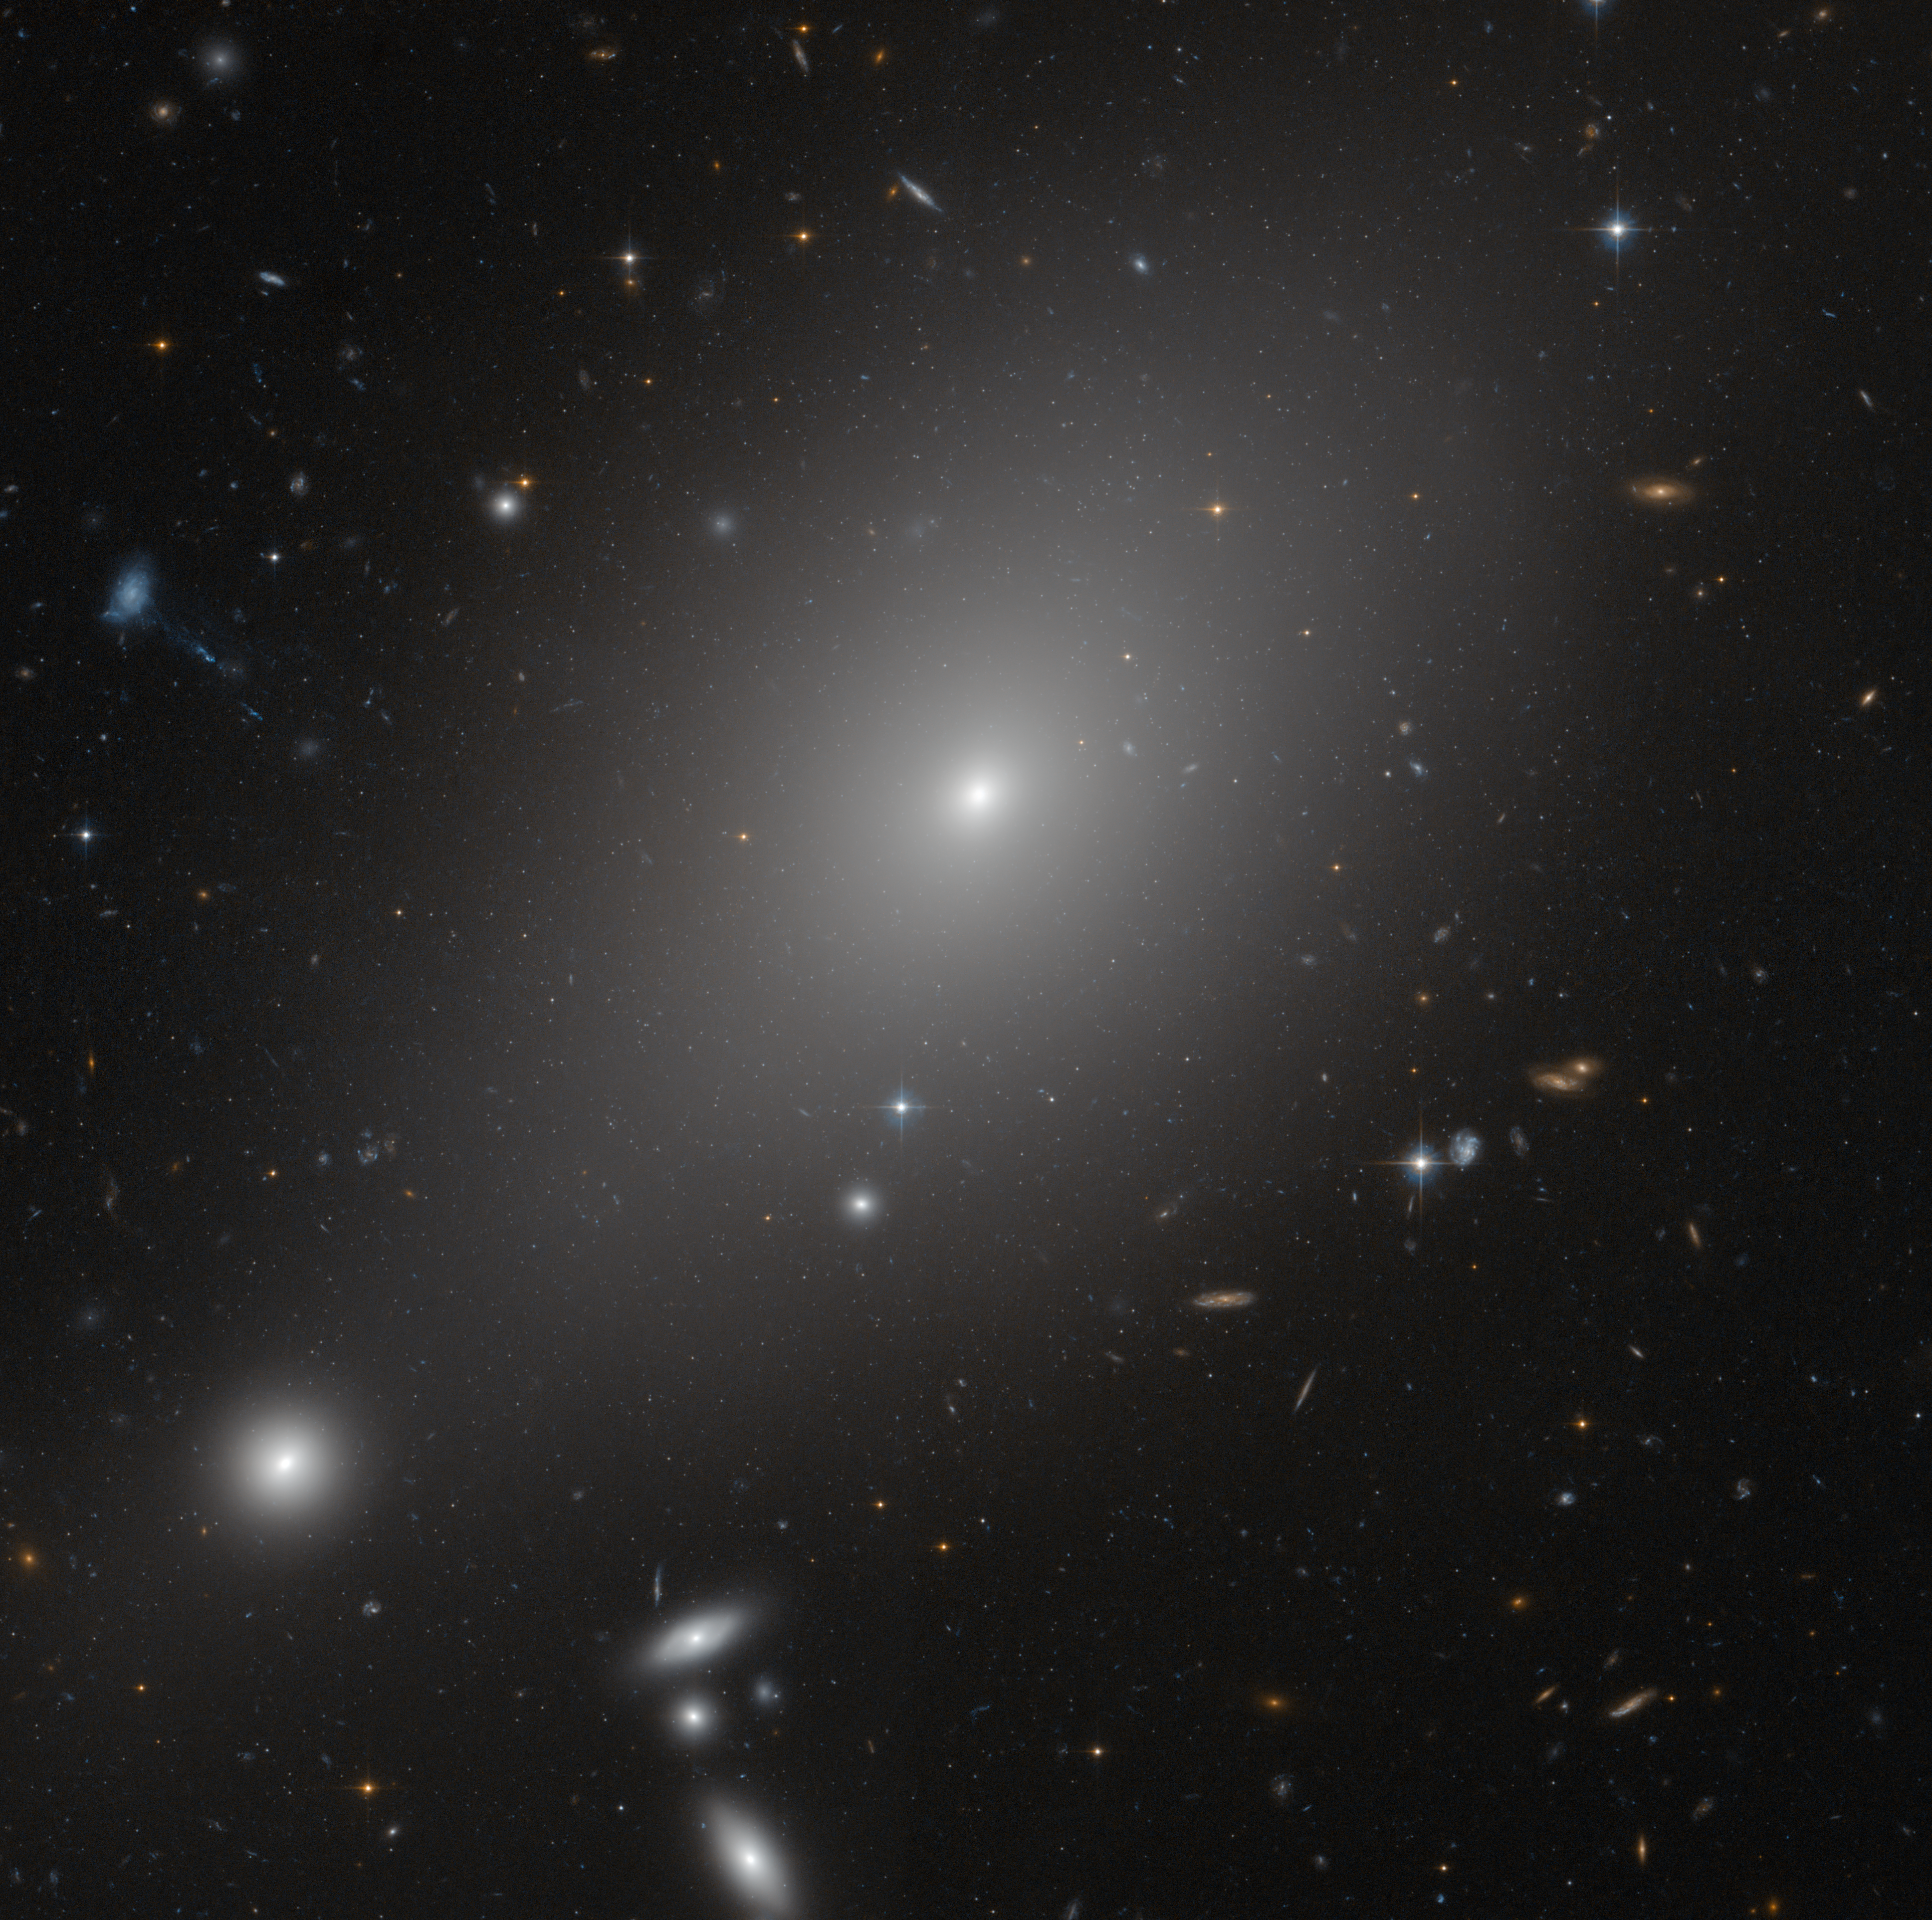

ACS image of ESO 306-17

This image from the Advanced Camera for Surveys aboard the NASA/ESA Hubble Space Telescope highlights the large and bright elliptical galaxy called ESO 306-17 in the southern sky.

In this image, it appears that ESO 306-17 is surrounded by other galaxies but the bright galaxies at bottom left are thought to be in the foreground, not at the same distance in the sky. In reality, ESO 306-17 lies fairly abandoned in an enormous sea of dark matter and hot gas.

Researchers are also using this image to search for nearby ultra-compact dwarf galaxies. Ultra-compact dwarfs are mini versions of dwarf galaxies that have been left with only their core due to interaction with larger, more powerful galaxies. Most ultra-compact dwarfs discovered to date are located near giant elliptical galaxies in large clusters of galaxies, so it will be interesting to see if researchers find similar objects in fossil groups.

Credit: NASA, ESA and Michael West (ESO)